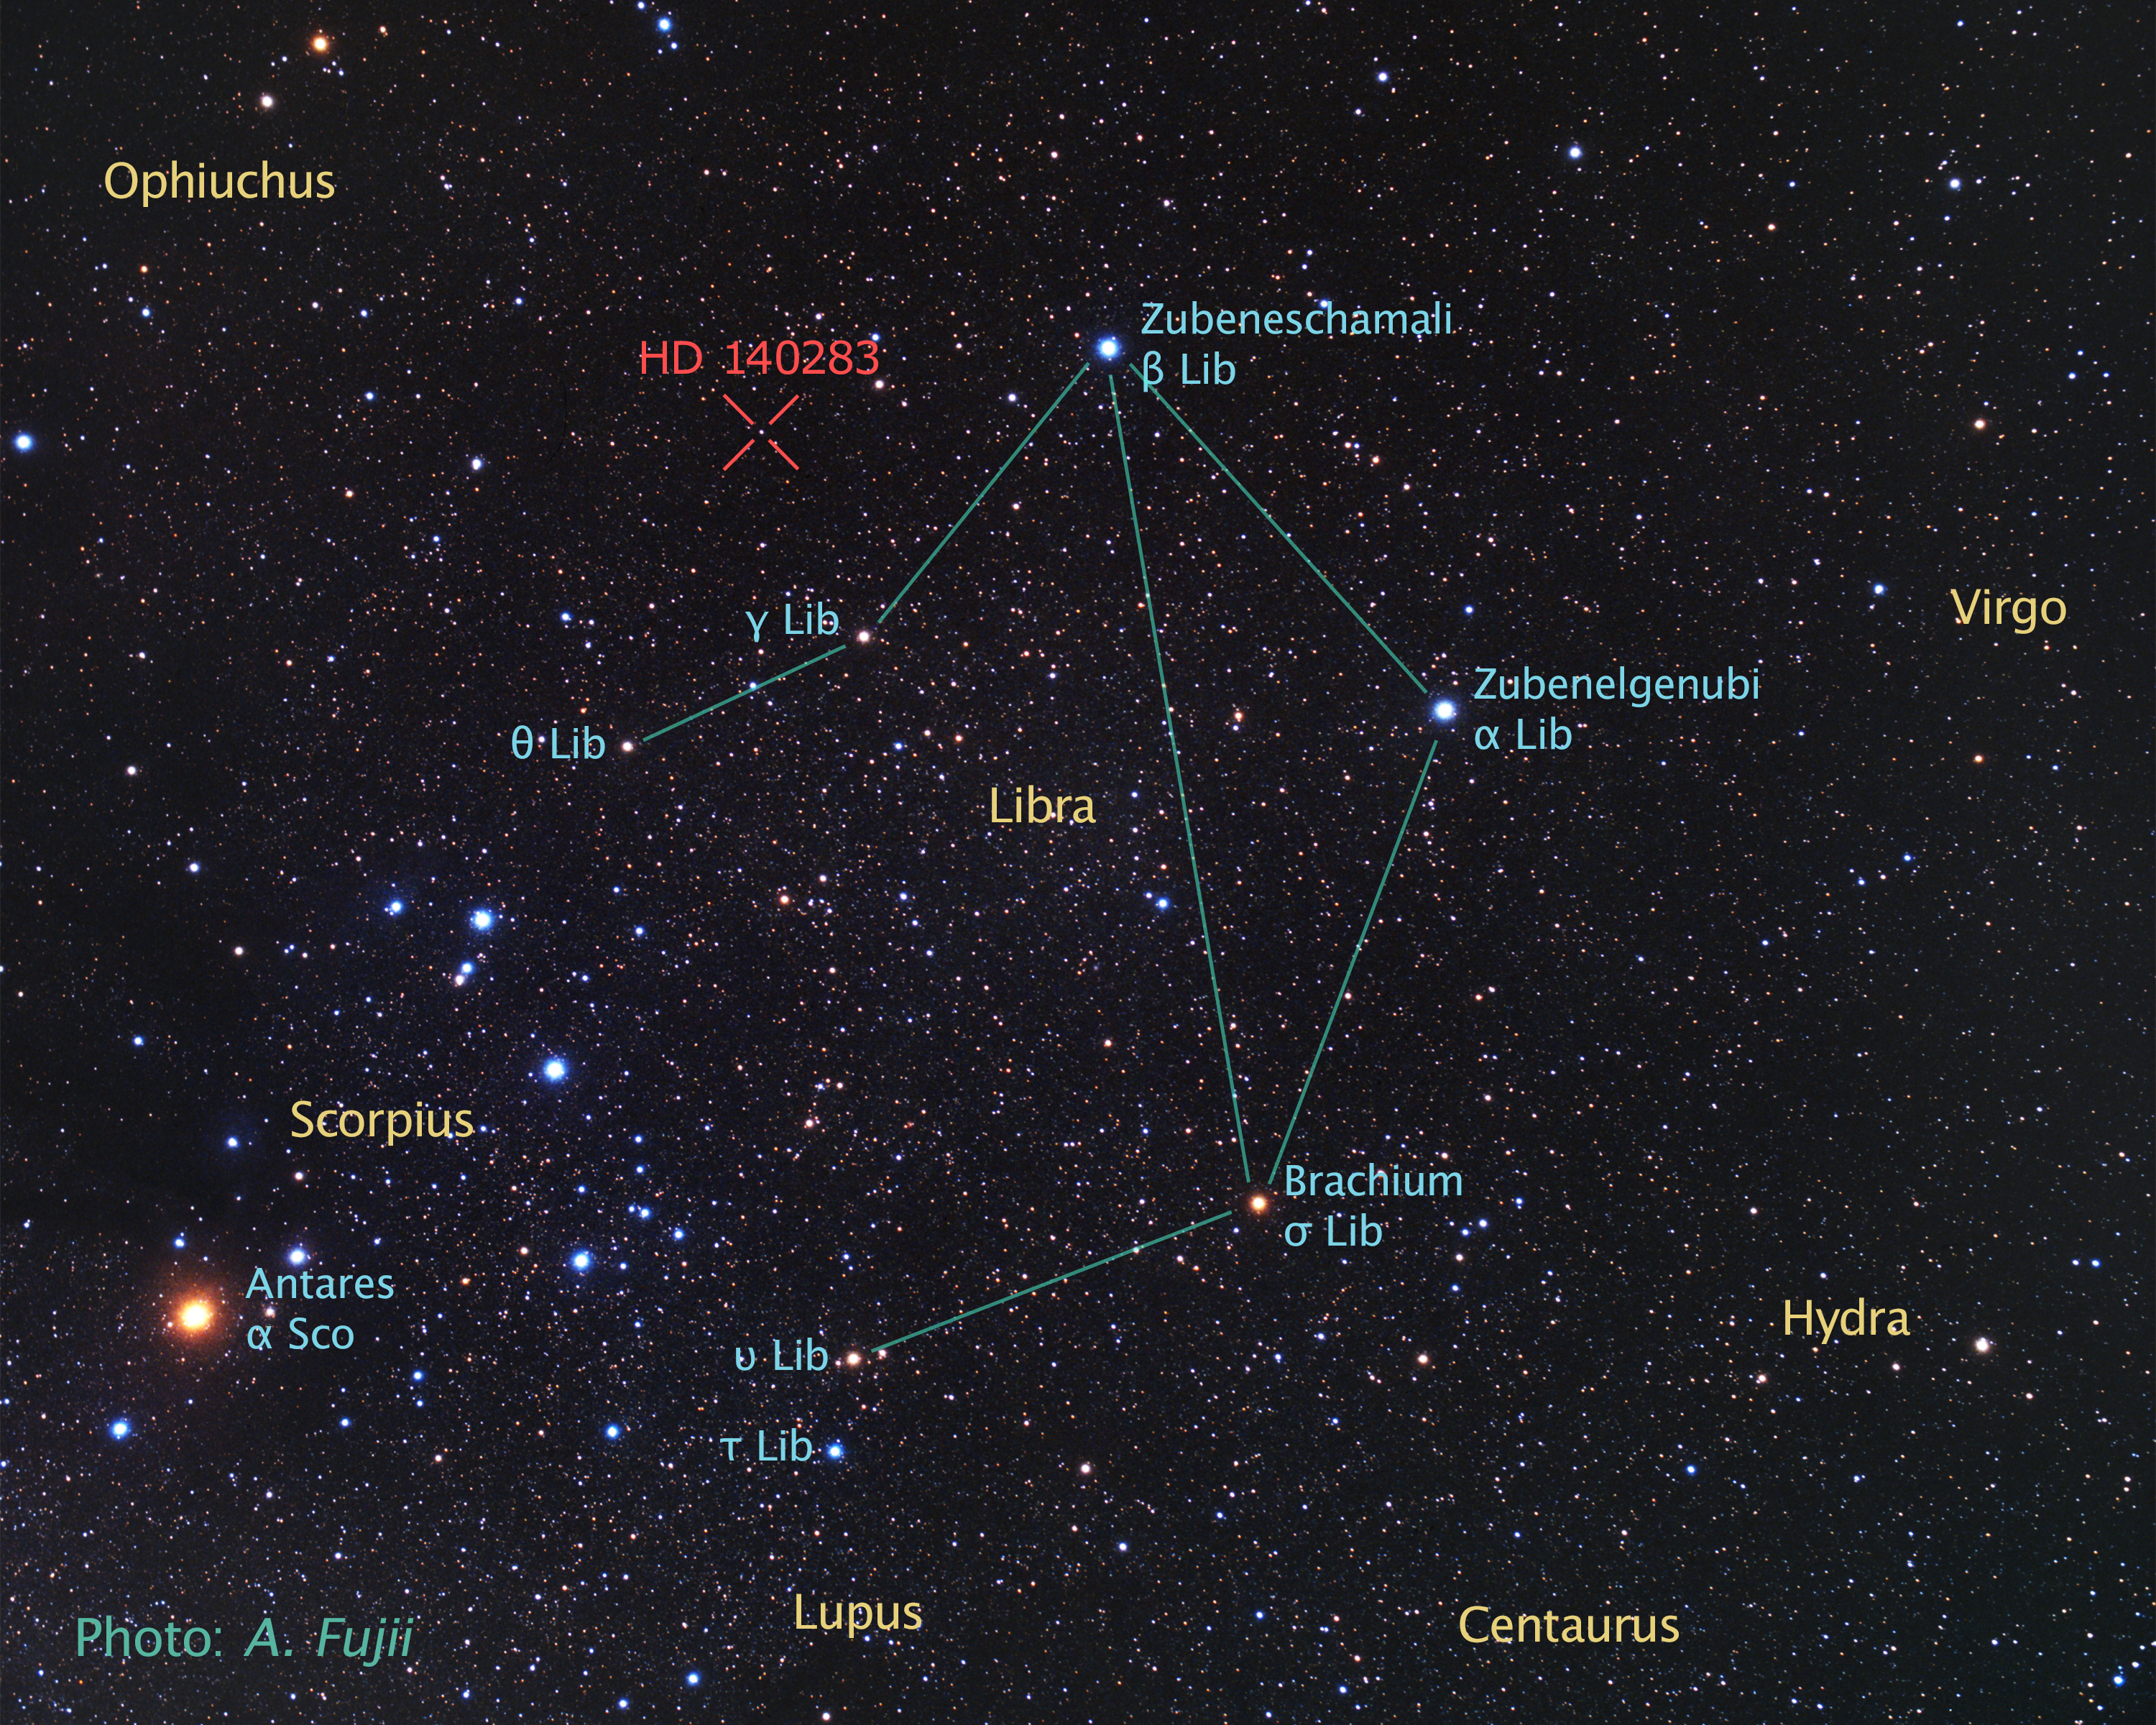

Backyard view of sky around HD 140283

This is a view of the sky surrounding the ancient star catalogued as HD 140283, which lies over 190 light-years from Earth.

Credit: A. Fujii and Z. Levay (STScI)